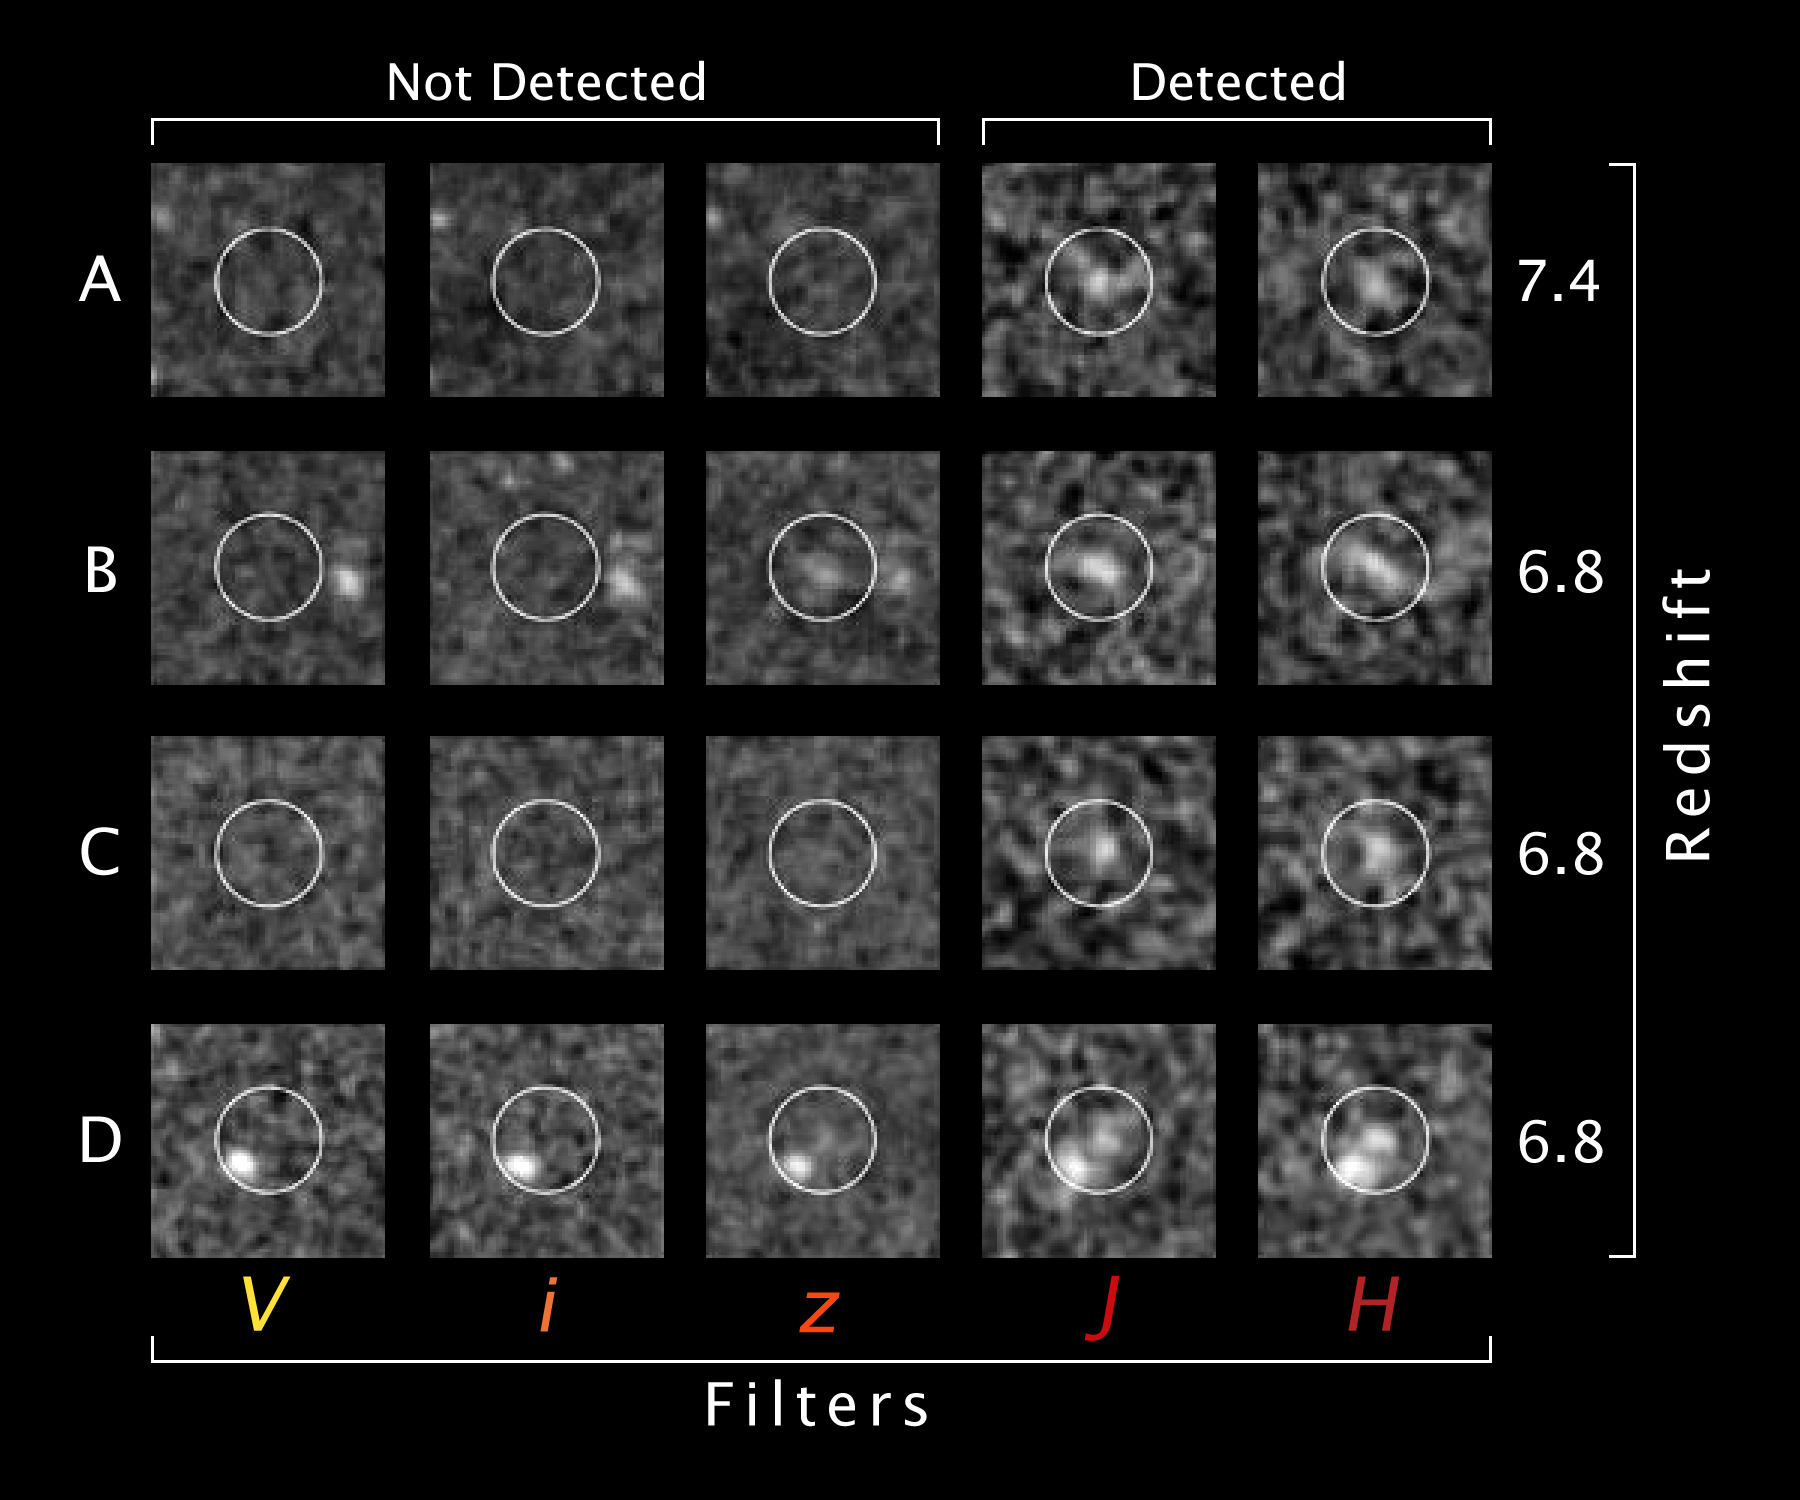

Tracing the evolution of the first galaxies in the Universe

A systematic search for the first bright galaxies to form in the early Universe has revealed a dramatic jump in the number of such galaxies around 13 billion years ago. These observations of the earliest stages in the evolution of galaxies provide new evidence for the hierarchical theory of galaxy formation – the idea that large galaxies built up over time as smaller galaxies collided and merged. An international team of astronomers used the NASA/ESA Hubble Space Telescope to explore the formation of galaxies during the first 900 million years after the Big Bang. They reported their latest findings in the September 14 issue of the journal Nature. Deep observations in three dark patches of sky – the Hubble Ultra Deep Field and the Great Observatories Origins Deep Survey fields – gathered the faint light emitted 13 billion years ago by stars in primeval galaxies. Only the brightest galaxies could be detected at such great distances. The researchers observed hundreds of bright galaxies at around 900 million years after the Big Bang. But when they looked deeper, about 200 million years earlier in time, they only found one. Relaxing their search criteria a bit turned up a few more candidates, so there must have been a lot of merging of smaller galaxies during those 200 million years.

This panel shows four candidate galaxies that are likely to have redshifts of 7 and thus have emitted their light when the Universe was just 750 million years old. Astronomers can determine when light was emitted from a distant source by its redshift, a measure of how the expansion of the Universe stretched the wavelengths of the light as it traveled through space across vast distances.

Each of the four candidate high-redshift galaxies are presented in a distinct row. All four candidate galaxies are shown using images at each of five different wavelengths (591 nm, 776 nm, 944 nm, 1119 nm, and 1604 nm). These galaxies are all clearly detected at wavelengths redder than 1000 nm (indicated by the z, J and H filters), but remain completely undetected at wavelengths bluer than 800 nm (indicated by the V and i filters). This abrupt drop-off in the flux is strongly characteristic of star-forming galaxies at high redshifts and occurs due to the absorption of light by the large amounts of neutral hydrogen in the Universe at early times. Astronomers use the presence of this break to find high-redshift galaxies. The search is described in the September 14, 2006 issue of Nature.

Credit: NASA & ESA